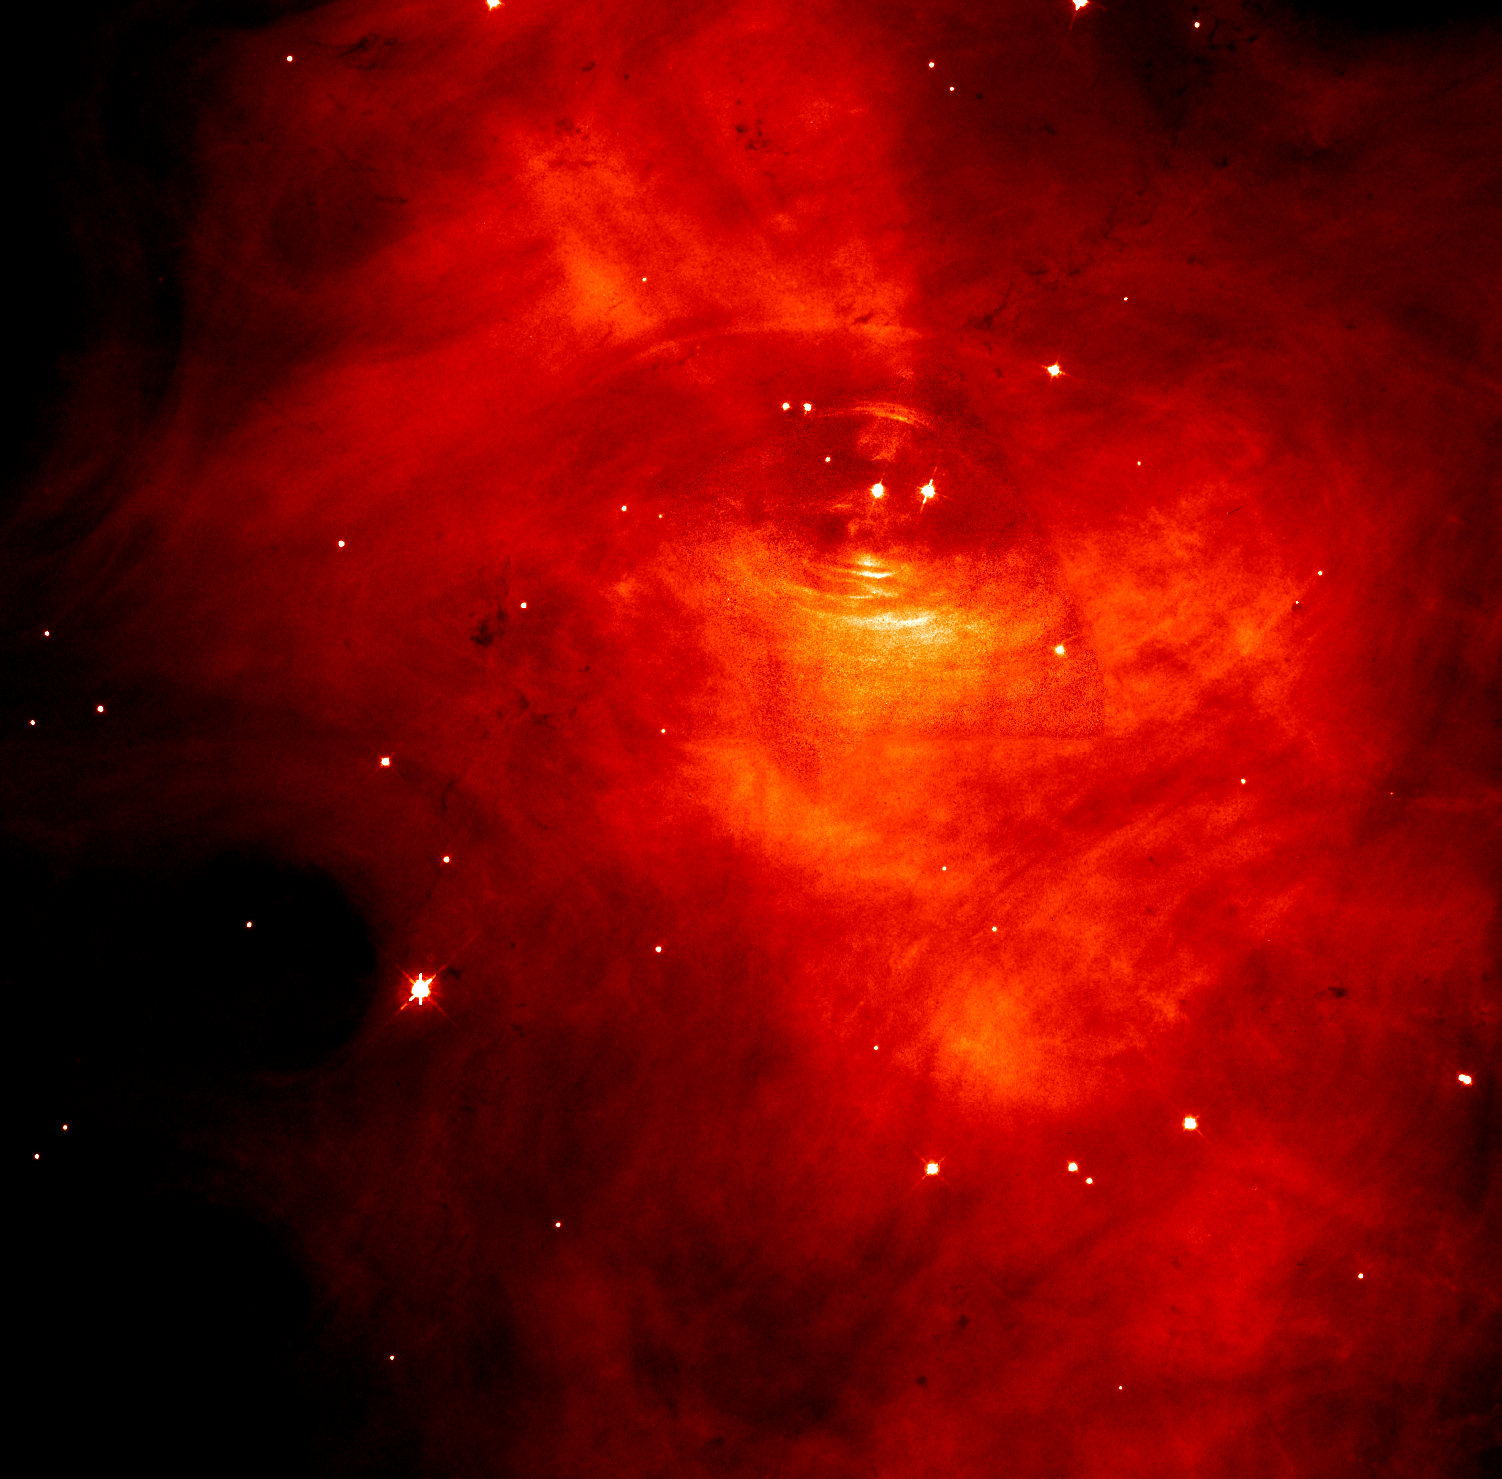

The Crab Nebula

This picture shows a Hubble Space Telescope image of the inner parts of the Crab. The pulsar itself is visible as the left of the pair of stars near the centre of the frame.

Credit: Jeff Hester and Paul Scowen (Arizona State University), and NASA/ESA